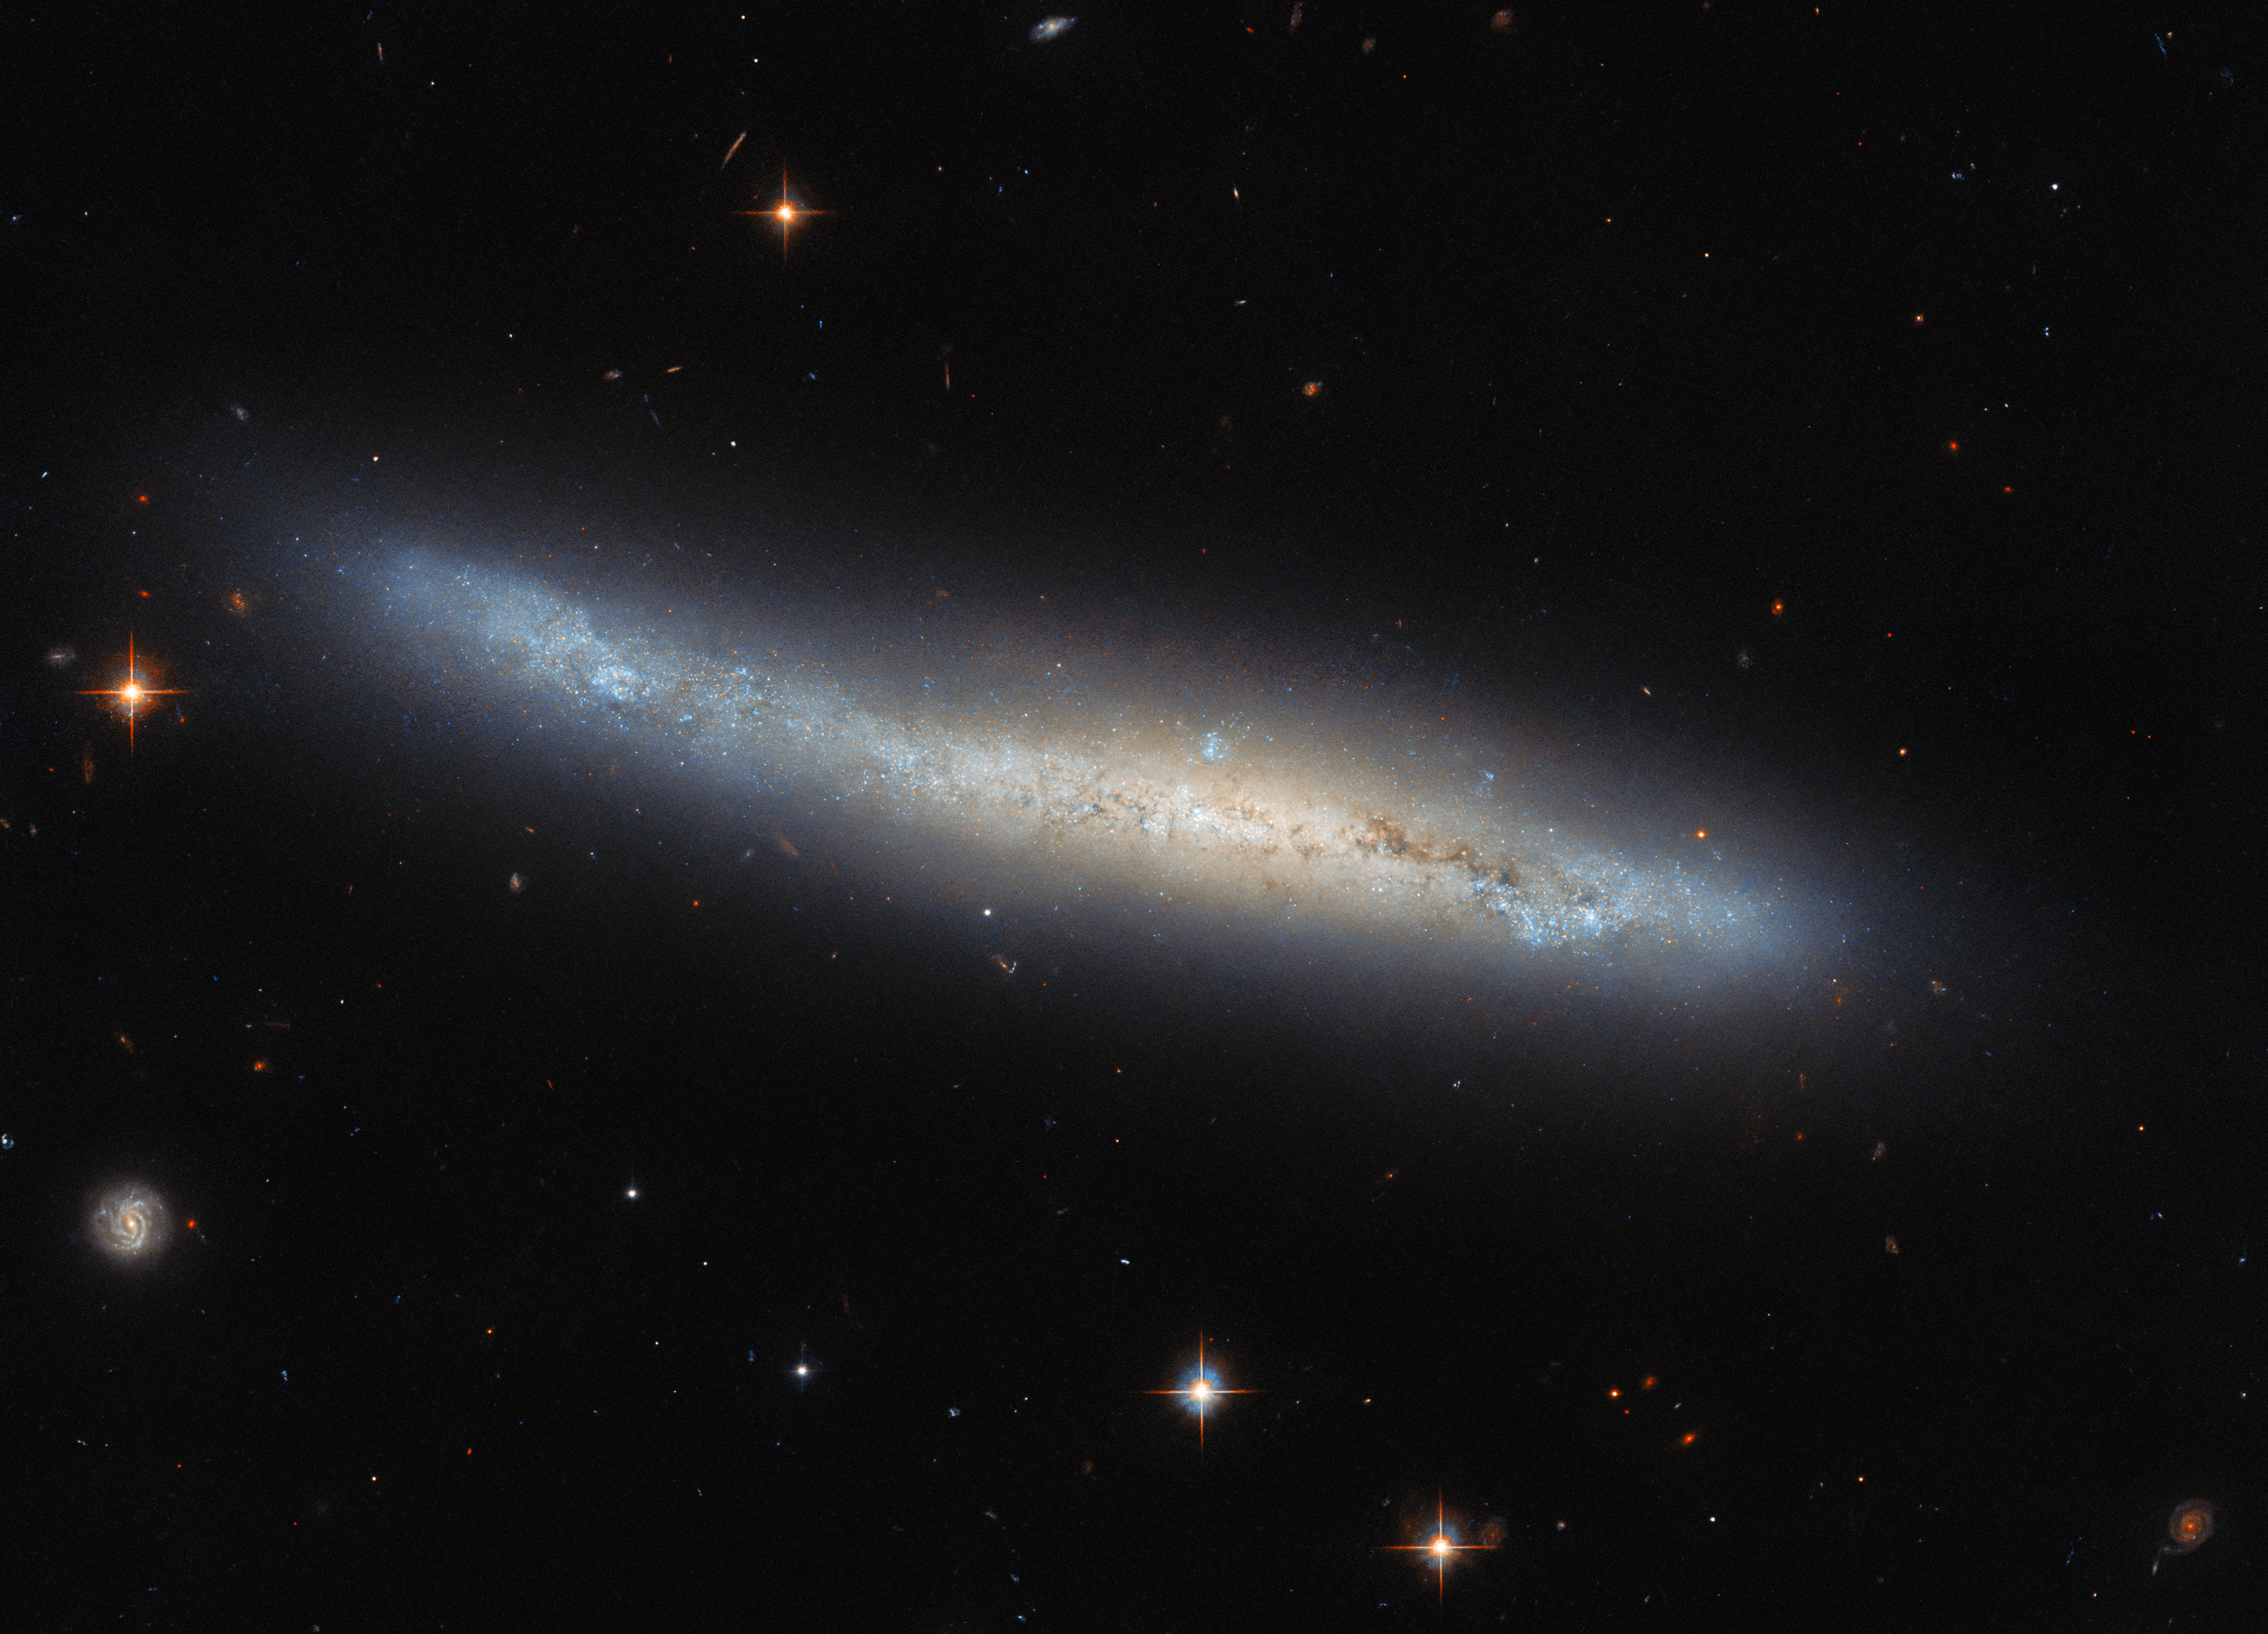

A matter of perspective

Here we see NGC 4423, a galaxy that lies about 55 million light-years away in the constellation Virgo. In this image NGC 4423 appears to have quite an irregular, tubular form, so it might be surprising to find out that it is in fact a spiral galaxy. Knowing this, we can make out the denser central bulge of the galaxy, and the less crowded surrounding disc (the part that comprises the spiral arms).

If NGC 4423 were viewed face-on it would resemble the shape that we most associate with spiral galaxies: the spectacular curving arms sweeping out from a bright centre, interspersed with dimmer, darker, less populated regions. But when observing the skies we are constrained by the relative alignments between Earth and the objects that we are observing: we cannot simply reposition Earth so that we can get a better face-on view of NGC 4423!

Of course, celestial objects do not remain sedentary in space, but often move at extremely rapid velocities relative to one another. This might suggest that, should a galaxy be moving in a fortuitous direction relative to Earth, we might be able to view it from a substantially different perspective once it has moved far enough. This is theoretically possible, but the reality is that the distances in space are simply far too big, and human lifetimes far too short, for a noticeable difference in relative alignment to occur. In other words, this is more-or-less the view of NGC 4423 that we will always have!

Credit: ESA/Hubble & NASA, M. Sun